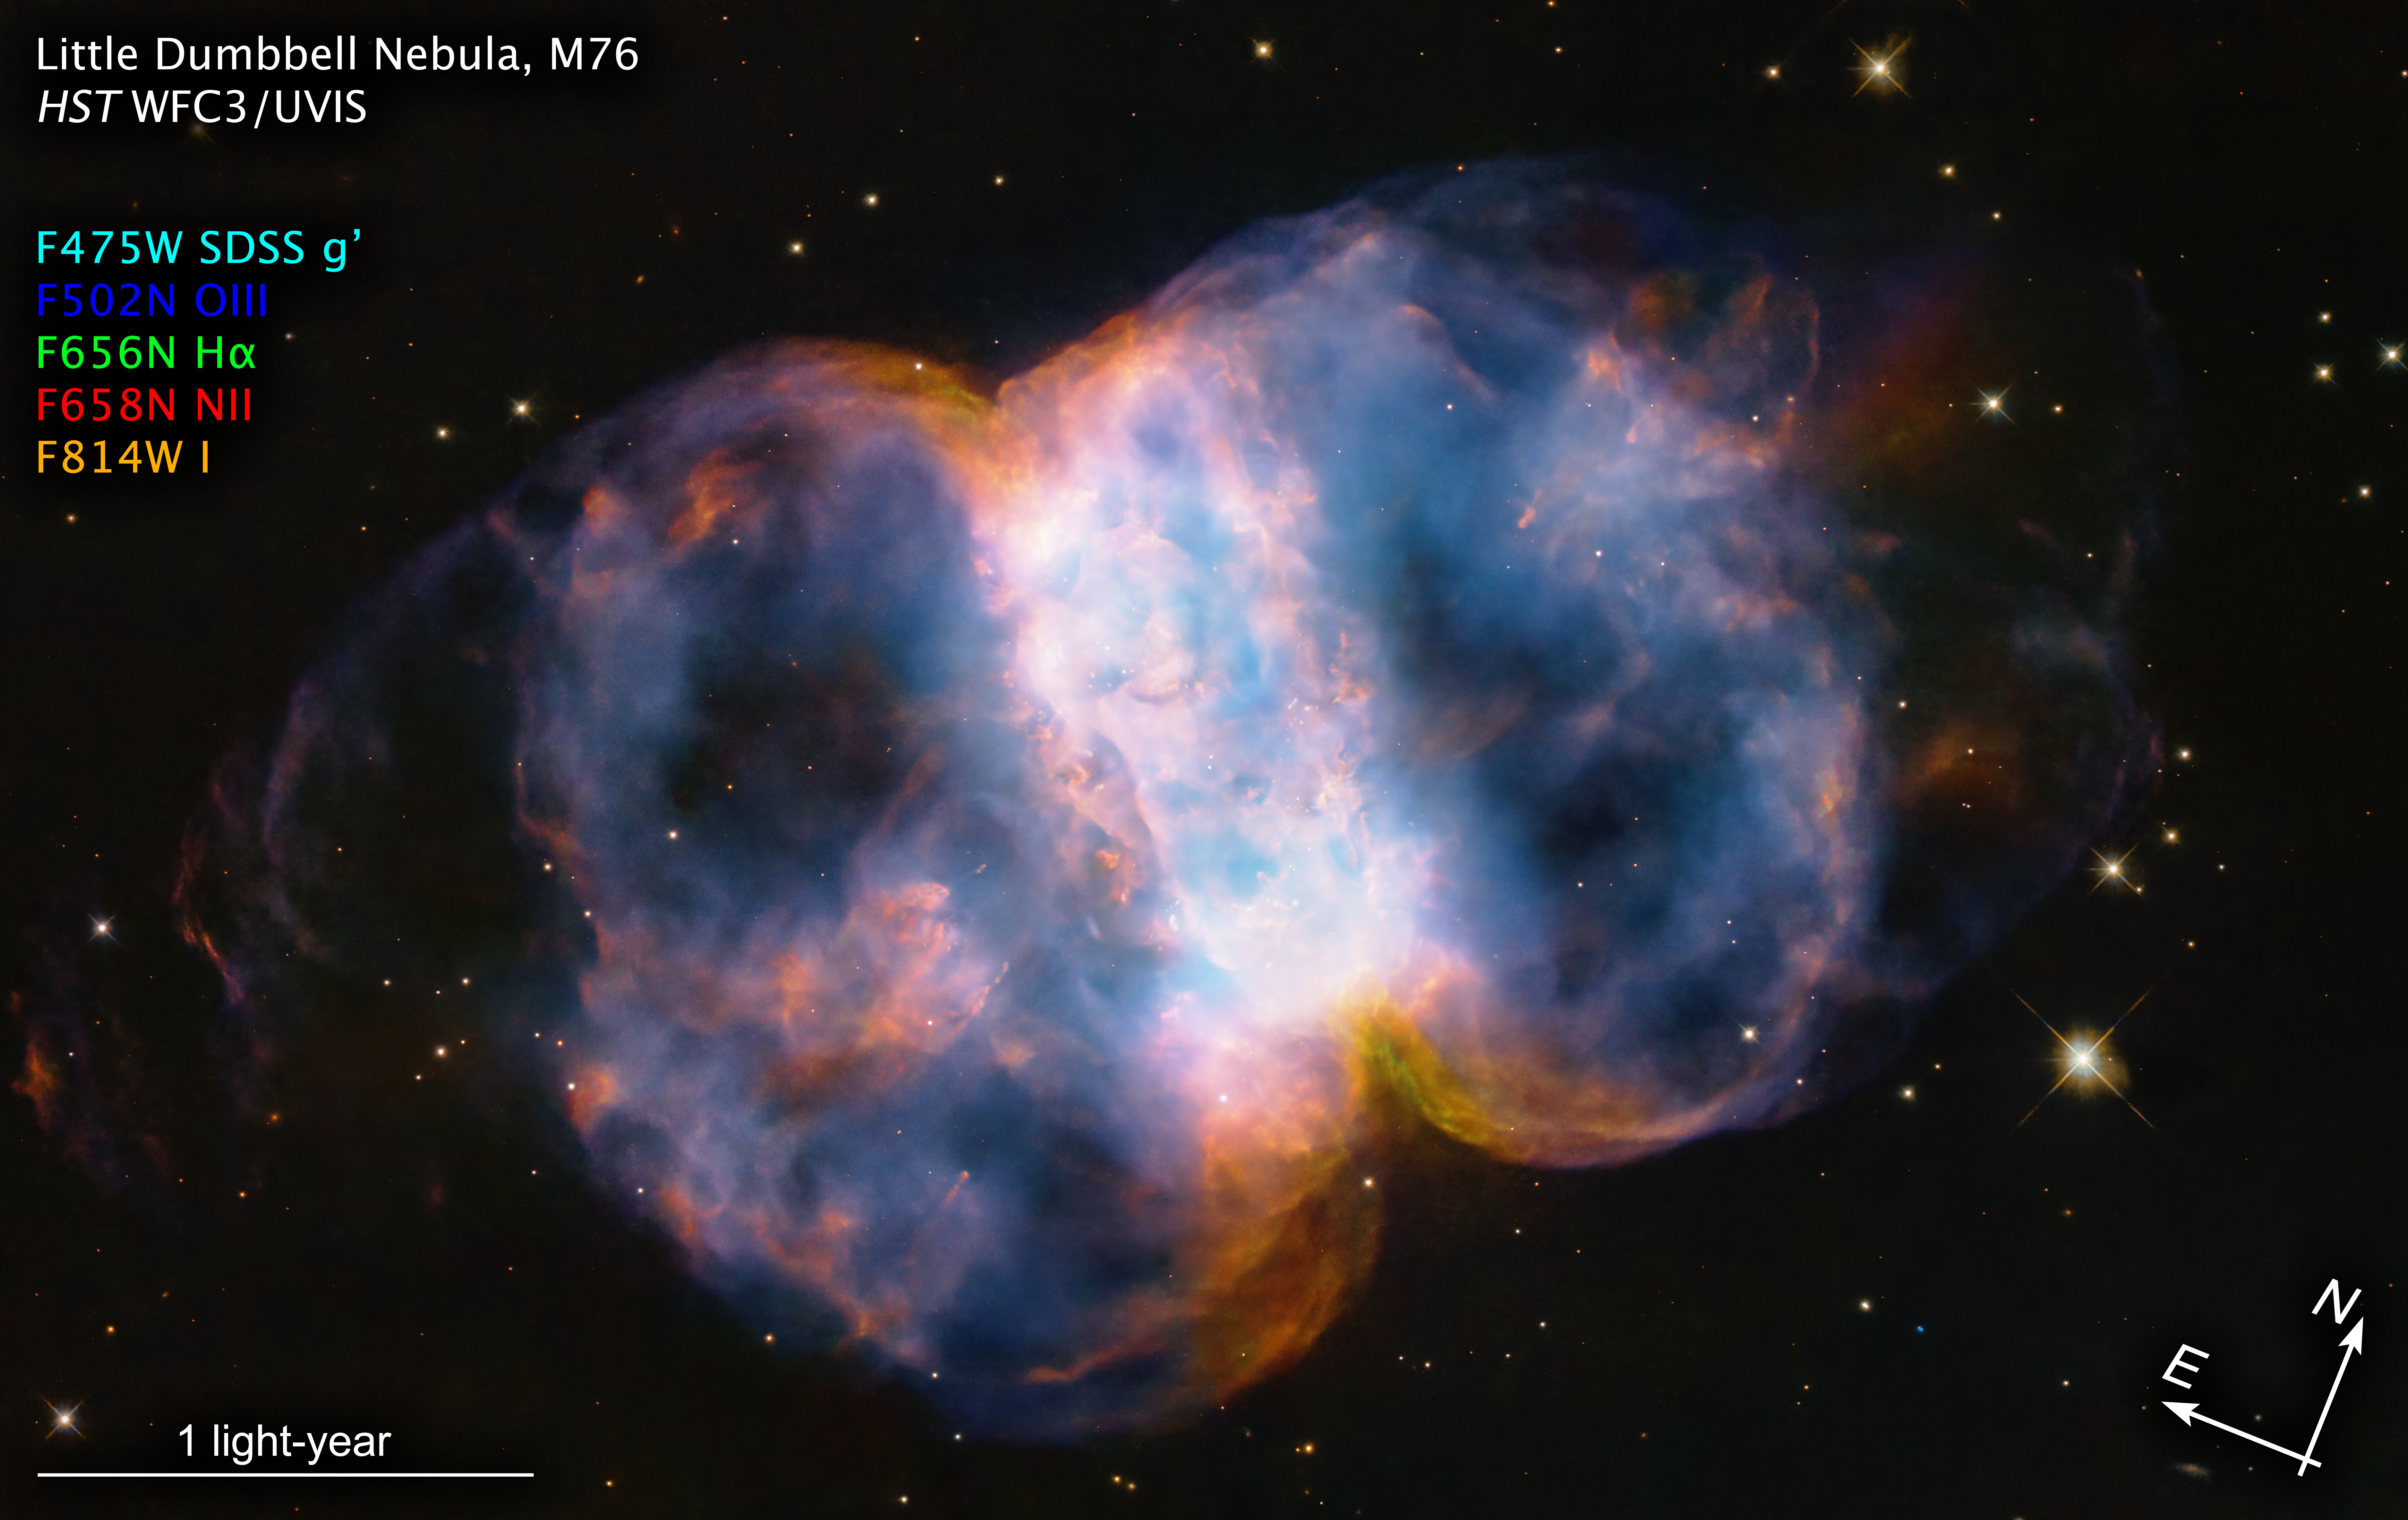

Little Dumbbell Nebula (M76, annotated)

In celebration of the 34th anniversary of the launch of the legendary NASA/ESA Hubble Space Telescope, astronomers took a snapshot of the Little Dumbbell Nebula (also known as Messier 76, M76, or NGC 650/651) located 3400 light-years away in the northern circumpolar constellation Perseus. The photogenic nebula is a favourite target of amateur astronomers.

M76 is classified as a planetary nebula. This is a misnomer because it is unrelated to planets. But its round shape suggested it was a planet to astronomers who first viewed it through low-power telescopes. In reality, a planetary nebula is an expanding shell of glowing gases that were ejected from a dying red giant star. The star eventually collapses to an ultra-dense, hot white dwarf.

M76 is composed of a ring, seen edge-on as the central bar structure, and two lobes on either opening of the ring. Before the star burned out, it ejected the ring of gas and dust. The ring was probably sculpted by the effects of the star that once had a binary companion star. This sloughed-off material created a thick disc of dust and gas along the plane of the companion’s orbit. The hypothetical companion star isn’t seen in the Hubble image, and so it could have been later swallowed by the central star. The disc would be forensic evidence for that stellar cannibalism.

The primary star is collapsing to form a white dwarf. It is one of the hottest stellar remnants known at a scorching 120 000 degrees Celsius, 24 times our Sun’s surface temperature.  The sizzling white dwarf can be seen as a pinpoint in the centre of the nebula. A star visible in projection beneath it is not part of the nebula.  

Pinched off by the disc, two lobes of hot gas are escaping from the top and bottom of the ‘belt’ along the star’s rotation axis that is perpendicular to the disc. They are being propelled by the hurricane-like outflow of material from the dying star, tearing across space at two million miles per hour. That’s fast enough to travel from Earth to the Moon in a little over seven minutes! This torrential ‘stellar wind’ is ploughing into cooler, slower-moving gas that was ejected at an earlier stage in the star’s life, when it was a red giant. Ferocious ultraviolet radiation from the super-hot star is causing the gases to glow. The red colour is from nitrogen, and blue is from oxygen. 

The entire nebula is a flash in the pan by cosmological timekeeping. It will vanish in about 15 000 years.

Credit: NASA, ESA, STScI, A. Pagan (STScI)